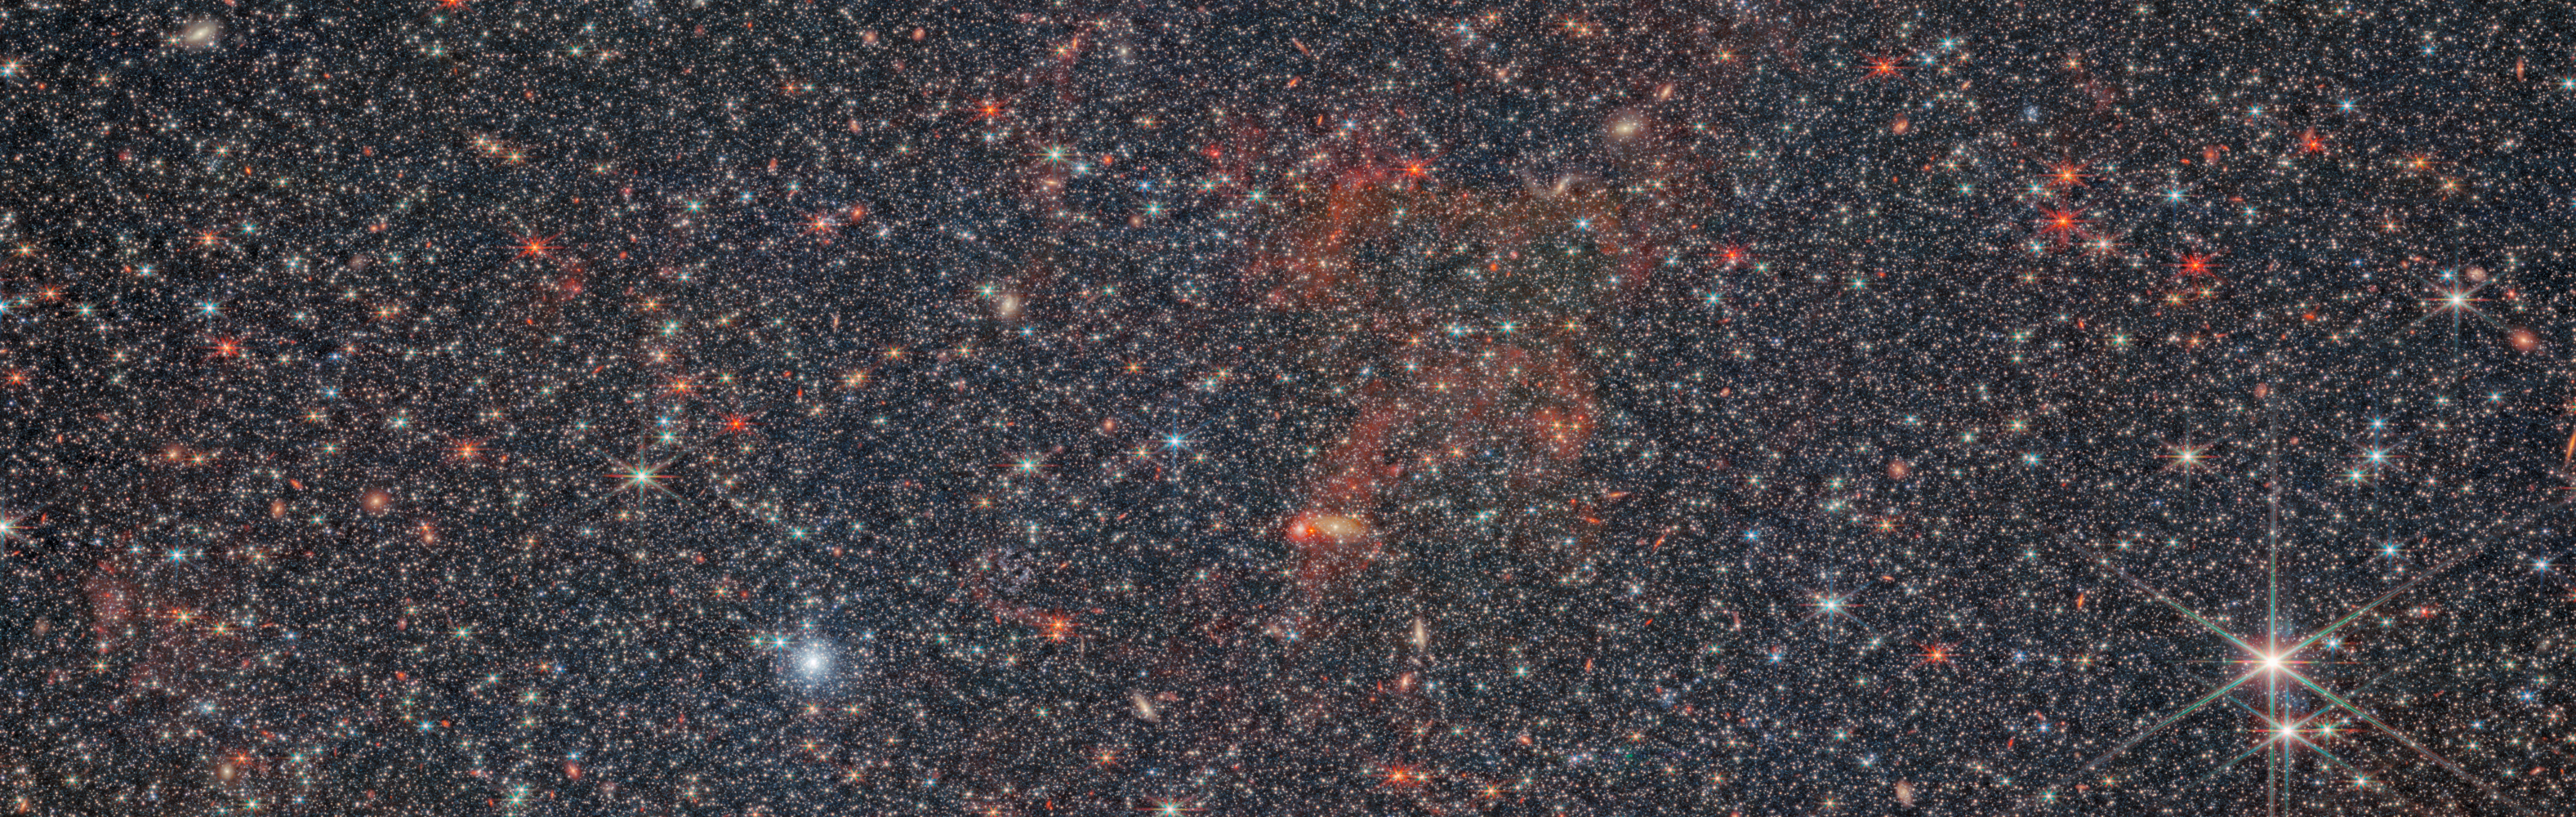

NGC 6822 (NIRCam image)

This scaled image shows the irregular galaxy NGC 6822, which was observed by the Near-InfraRed Camera (NIRCam) mounted on the NASA/ESA/CSA James Webb Space Telescope.

Webb’s near-infrared NIRCam image shows the galaxy’s countless stars in incredible detail. Here, the dust and gas that pervade the galaxy are reduced to translucent red wisps, laying the stars bare for astronomical study. The power of Webb’s ice-cold infrared instruments and the incredible resolution of its primary mirror is necessary to examine stars hidden in dusty environments, and the results as shown here are spectacular.

The brightest stars appear in pale blue and cyan colours in this image, colours which are assigned to the shortest wavelengths of light that NIRCam can detect: red and near infrared. The amount of light emitted by any star decreases at longer and longer wavelengths, towards the mid-infrared, so the stars that are more faint to NIRCam also appear more warmly coloured here. A bright blue orb to the lower left of the gas is particularly prominent: this is a globular cluster, packed with stars.

This image has been cropped and downscaled from the full NIRCam resolution to match that of the MIRI image. See a combined MIRI+NIRCam view, and more information about NGC 6822, here.

Credit: ESA/Webb, NASA & CSA, M. Meixner